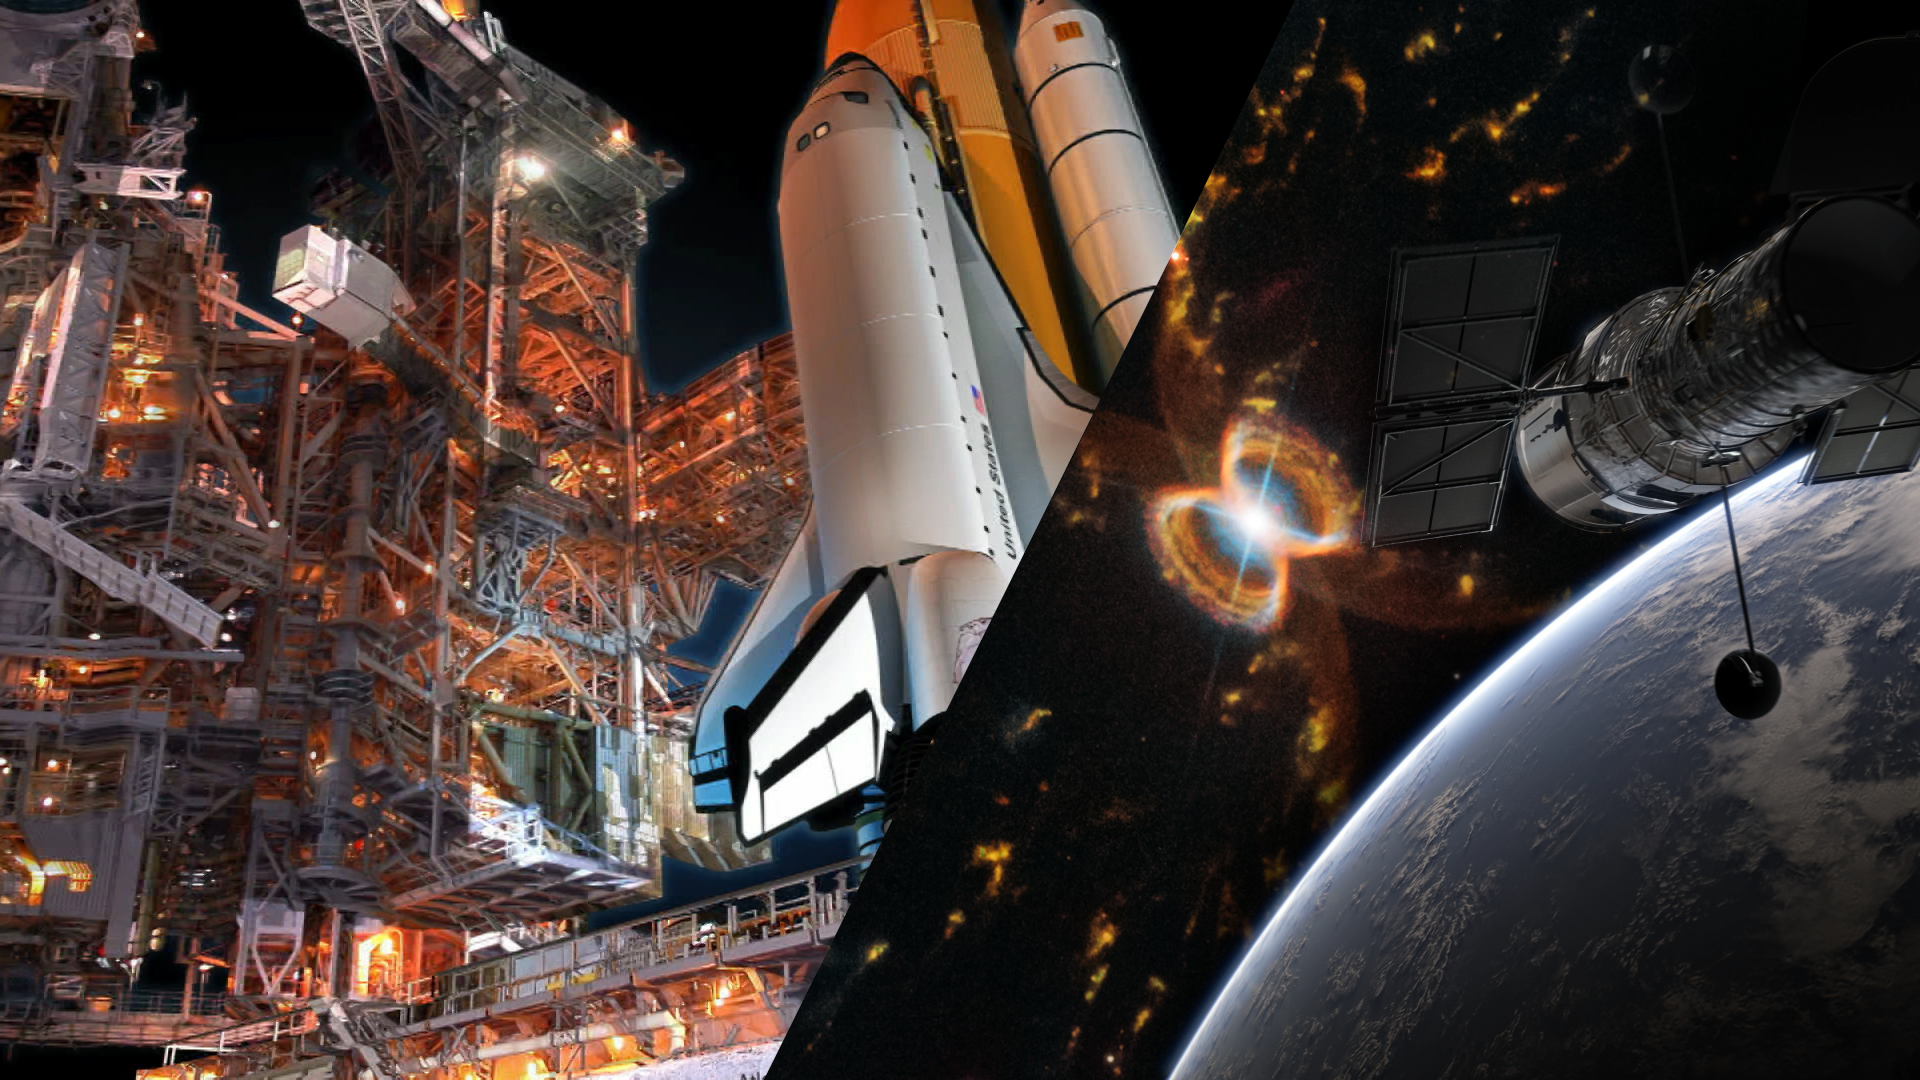

Screenshot of Hubblecast 119: The crab of the southern sky

Screenshot of Hubblecast 119: The crab of the southern sky.

Credit: ESA/Hubble